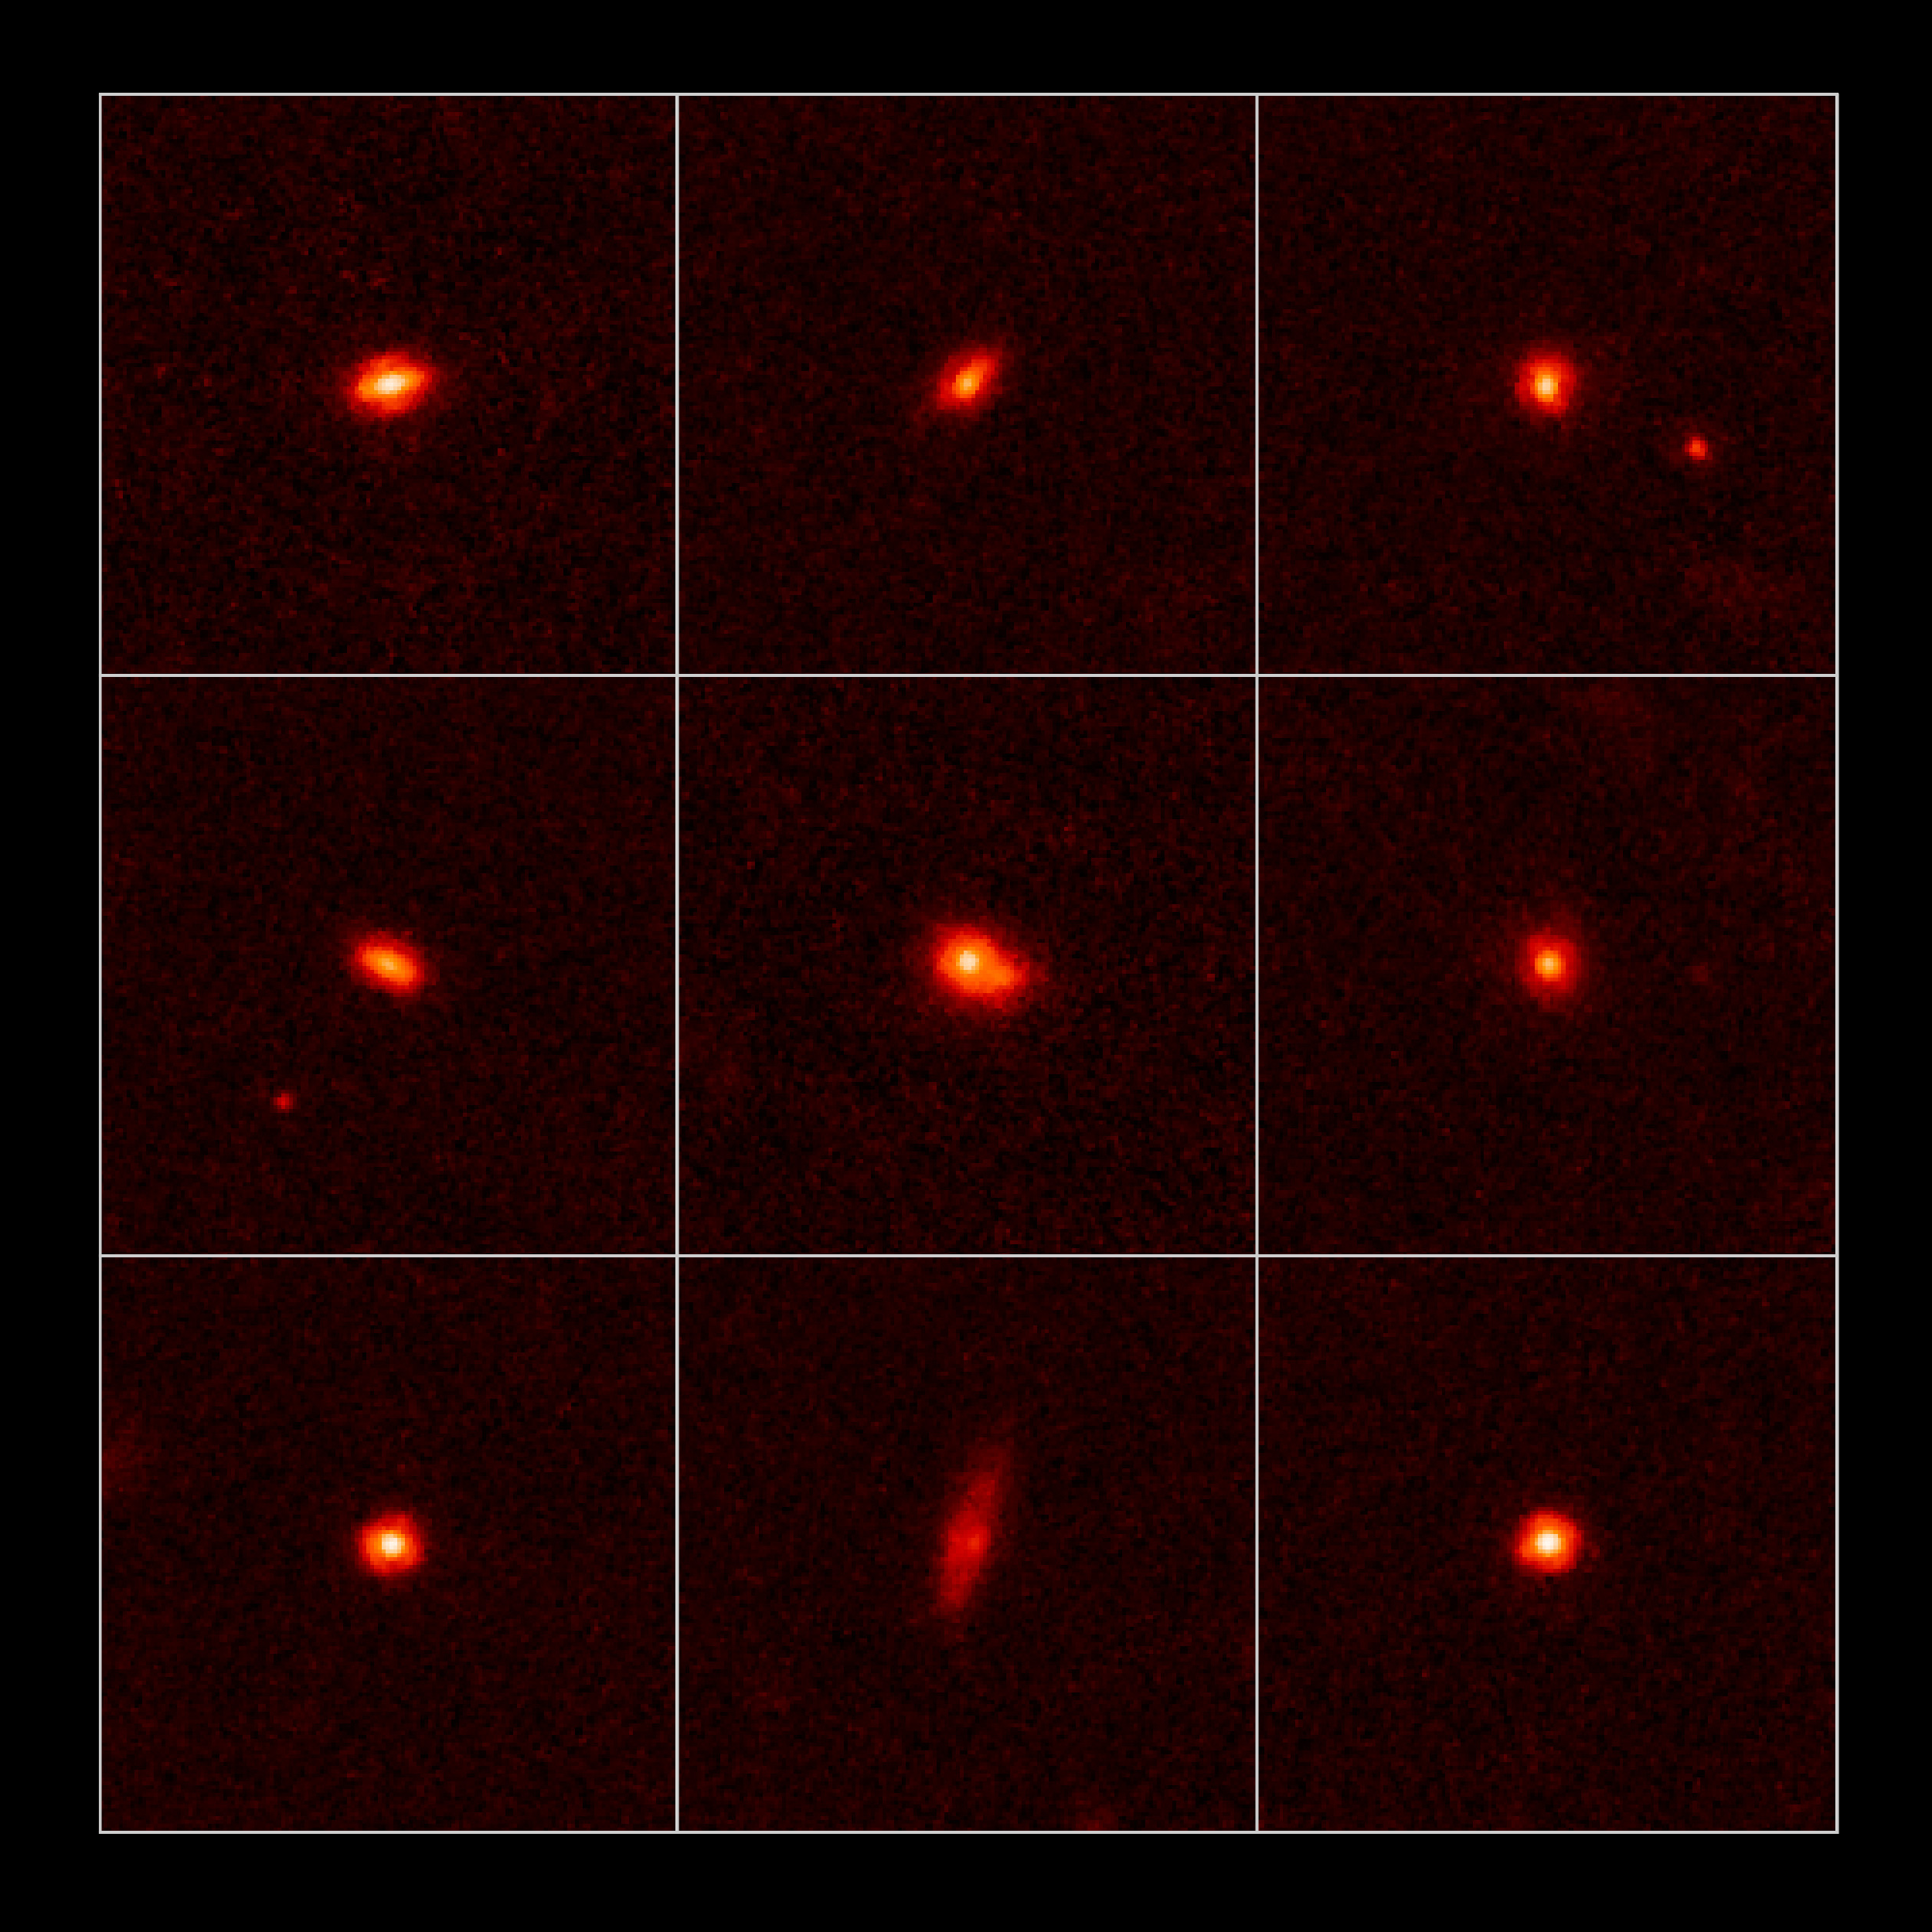

Hubble studies compact galaxies loaded with stars

These images taken by the NASA/ESA Hubble Space Telescope show nine compact, ultra-dense galaxies as they appeared 11 billion years ago.

The galaxies are only 5,000 light-years across and yet are 200 billion times more massive than the Sun. They are a fraction of the size of today's grownup galaxies but contain the same number of stars. Each galaxy could fit inside the central hub of our Milky Way Galaxy.

Hubble's Near Infrared Camera and Multi-Object Spectrometer snapped these images between June 2006 and June 2007.

Credit: NASA, ESA, P. van Dokkum (Yale University), M. Franx (Leiden University, The Netherlands), and G. Illingworth (University of California and Lick Observatory, Santa Cruz)